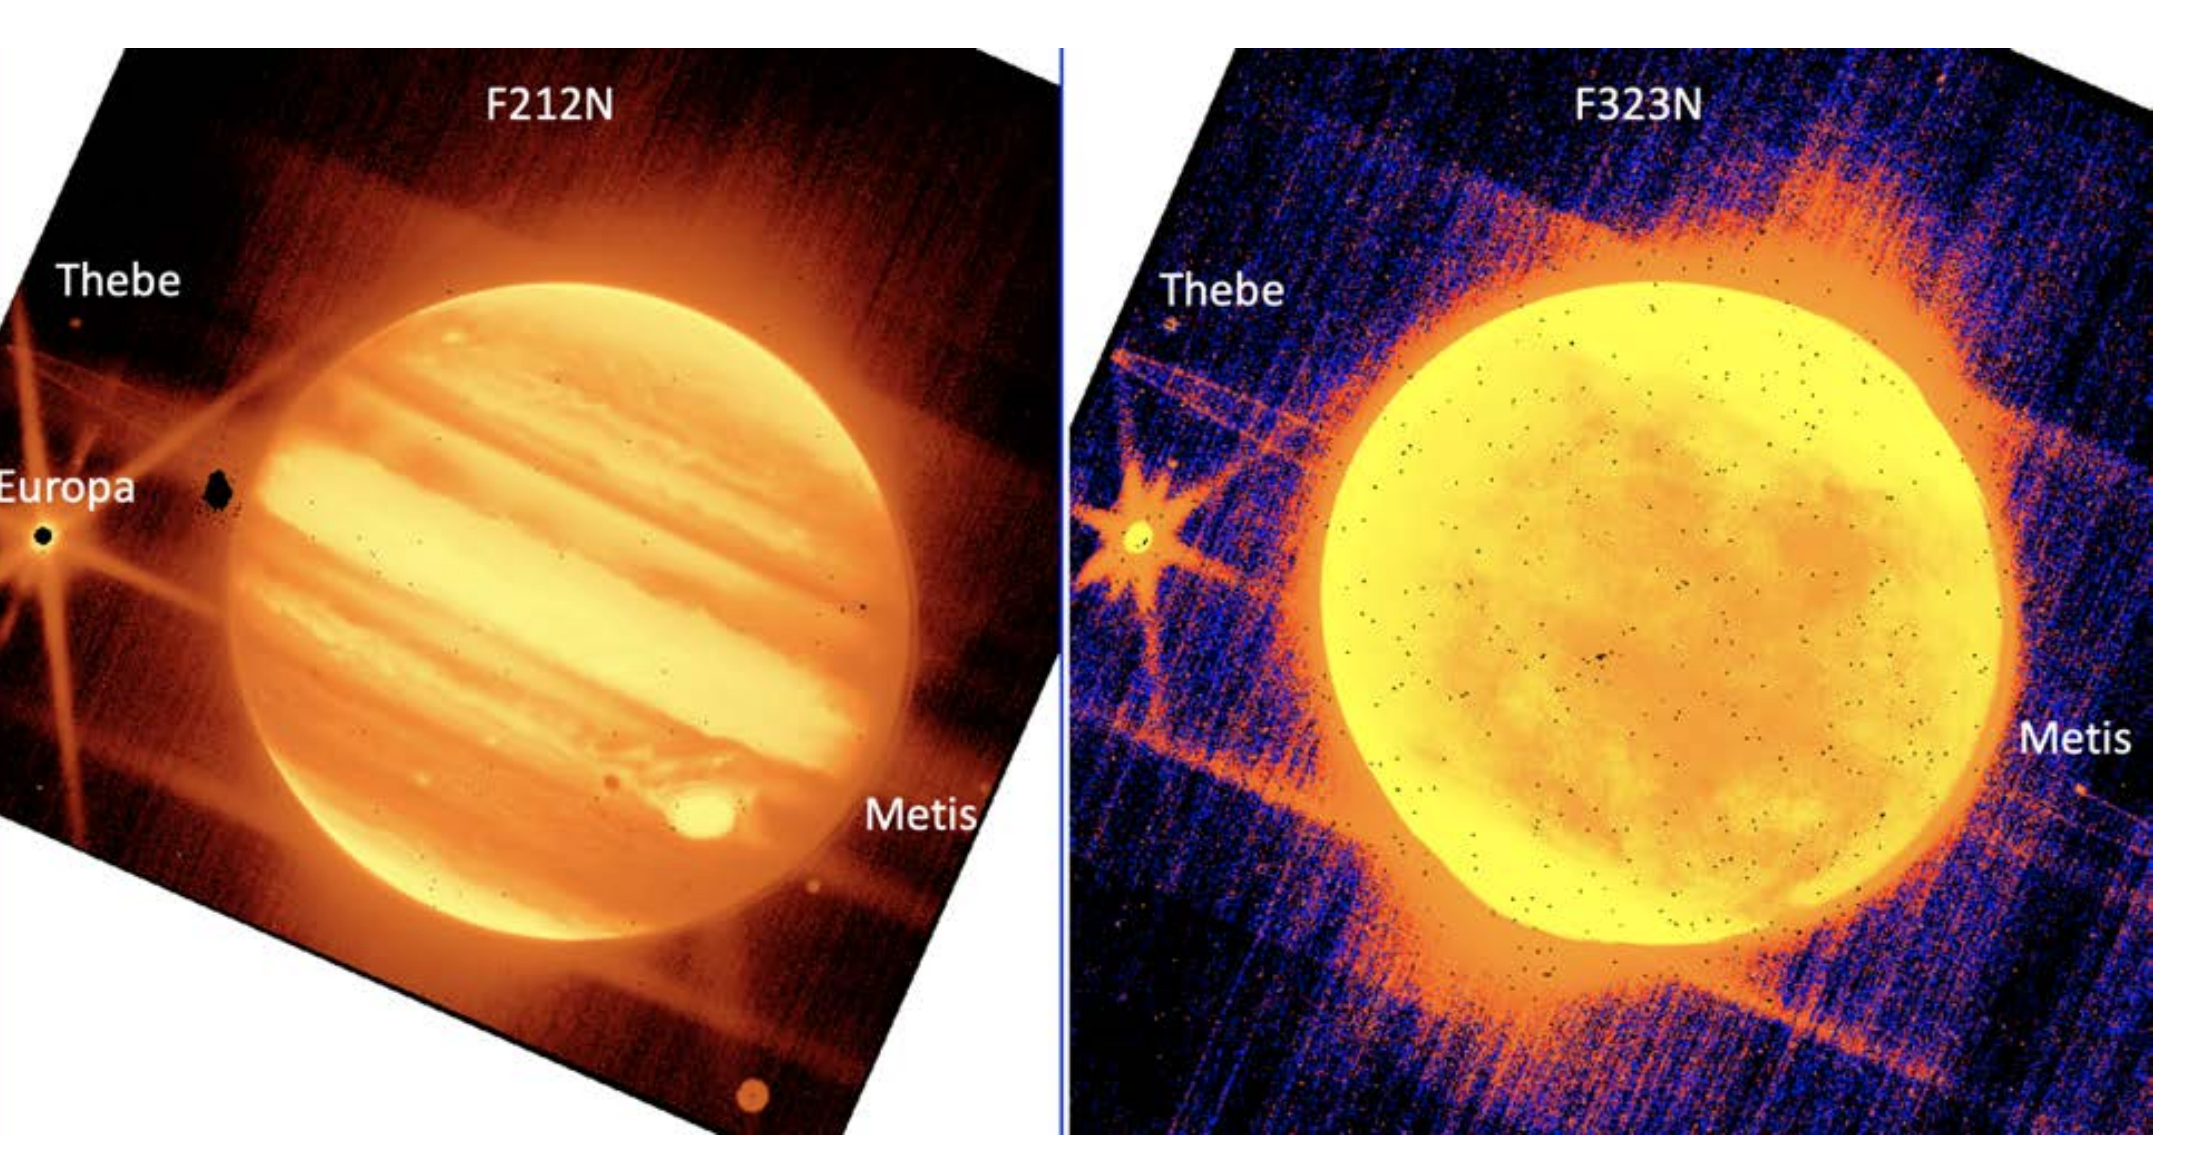

Jupiter, Europa, Thebe, and Metis (NIRCam) Commissioning Image

Left - Jupiter (center), and its moons Europa, Thebe, and Metis are seen through the NASA/ESA/CSA James Webb Space Telescope’s NIRCam instrument 2.12 micron filter.

The Great Red Spot appears yellow because of the way the infrared image was processed.

Right - Jupiter and its moons Europa, Thebe, and Metis are seen through NIRCam’s 3.23 micron filter.

Scientists were especially eager to see these commissioning images because they are proof that Webb can observe the satellites and rings near bright solar system objects such as Jupiter, Saturn, and Mars. Scientists will use Webb to explore the tantalizing question of whether we can see plumes of material spewing out of moons like Europa and Saturn’s moon Enceladus. Webb may be able to see the signatures of plumes depositing material on the surface on Europa.

Credit: NASA/ESA/CSA/STScI